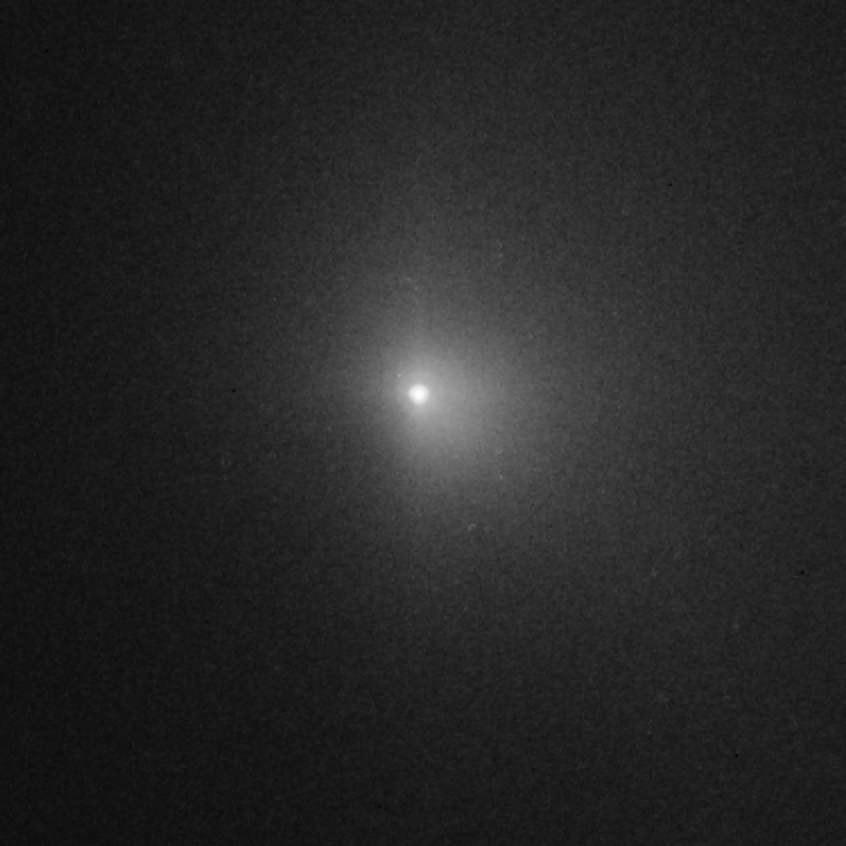

Hubble captures Deep Impact's collision with a comet (view 19h7 after impact)

This picture in the sequence shows the cloud becoming more diffuse.

Credit: NASA, ESA, P. Feldman (Johns Hopkins University), and H. Weaver (Johns Hopkins University Applied Physics Lab)